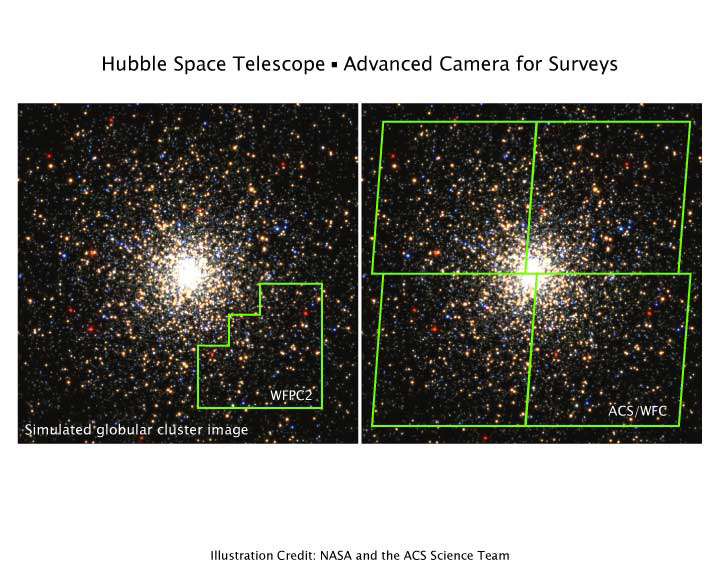

ACS's survey mode is ten times faster

Simulated globular star cluster field as viewed by the current HST imaging camera (WFPC2) and by the ACS Wide Field Camera. In this illustration, both instruments are used in survey mode to image the star cluster to the same absolute flux limit (the same 'depth').

The outlines of the field of view for each instrument are shown in green. In the same total exposure time, the ACS instrument can image to the same depth an area ten times larger than WFPC2 can.

Credit: NASA/ESA and the ACS Science Team